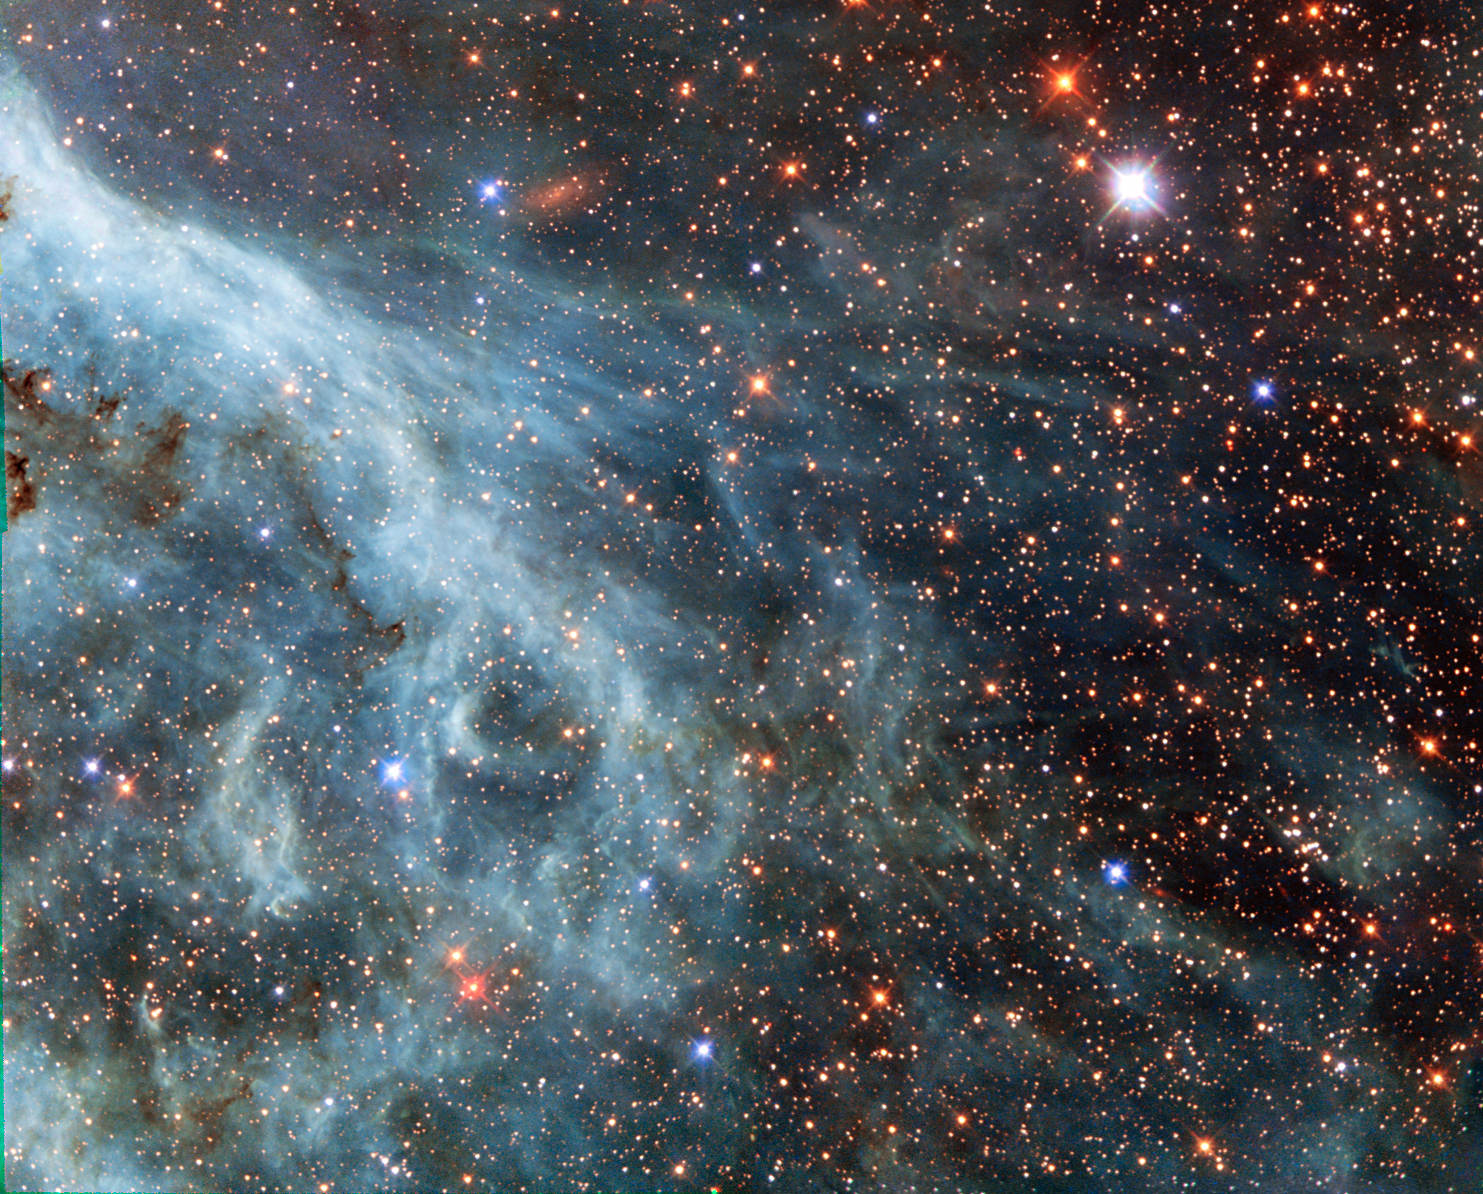

Turquoise-tinted plumes in the Large Magellanic Cloud

The brightly glowing plumes seen in this image are reminiscent of an underwater scene, with turquoise-tinted currents and nebulous strands reaching out into the surroundings.

However, this is no ocean. This image actually shows part of the Large Magellanic Cloud (LMC), a small nearby galaxy that orbits our galaxy, the Milky Way, and appears as a blurred blob in our skies. The NASA/ESA Hubble Space Telescope has peeked many times into this galaxy, releasing stunning images of the whirling clouds of gas and sparkling stars (opo9944a, heic1301, potw1408a).

This image shows part of the Tarantula Nebula's outskirts. This famously beautiful nebula, located within the LMC, is a frequent target for Hubble (heic1206, heic1402).

In most images of the LMC the colour is completely different to that seen here. This is because, in this new image, a different set of filters was used. The customary R filter, which selects the red light, was replaced by a filter letting through the near-infrared light. In traditional images, the hydrogen gas appears pink because it shines most brightly in the red. Here however, other less prominent emission lines dominate in the blue and green filters.

This data is part of the Archival Pure Parallel Project (APPP), a project that gathered together and processed over 1000 images taken using Hubble’s Wide Field Planetary Camera 2, obtained in parallel with other Hubble instruments. Much of the data in the project could be used to study a wide range of astronomical topics, including gravitational lensing and cosmic shear, exploring distant star-forming galaxies, supplementing observations in other wavelength ranges with optical data, and examining star populations from stellar heavyweights all the way down to solar-mass stars.

A version of this image was entered into the Hubble’s Hidden Treasures image processing competition by contestant Josh Barrington.

Credit: ESA/Hubble & NASA Acknowledgement: Josh Barrington